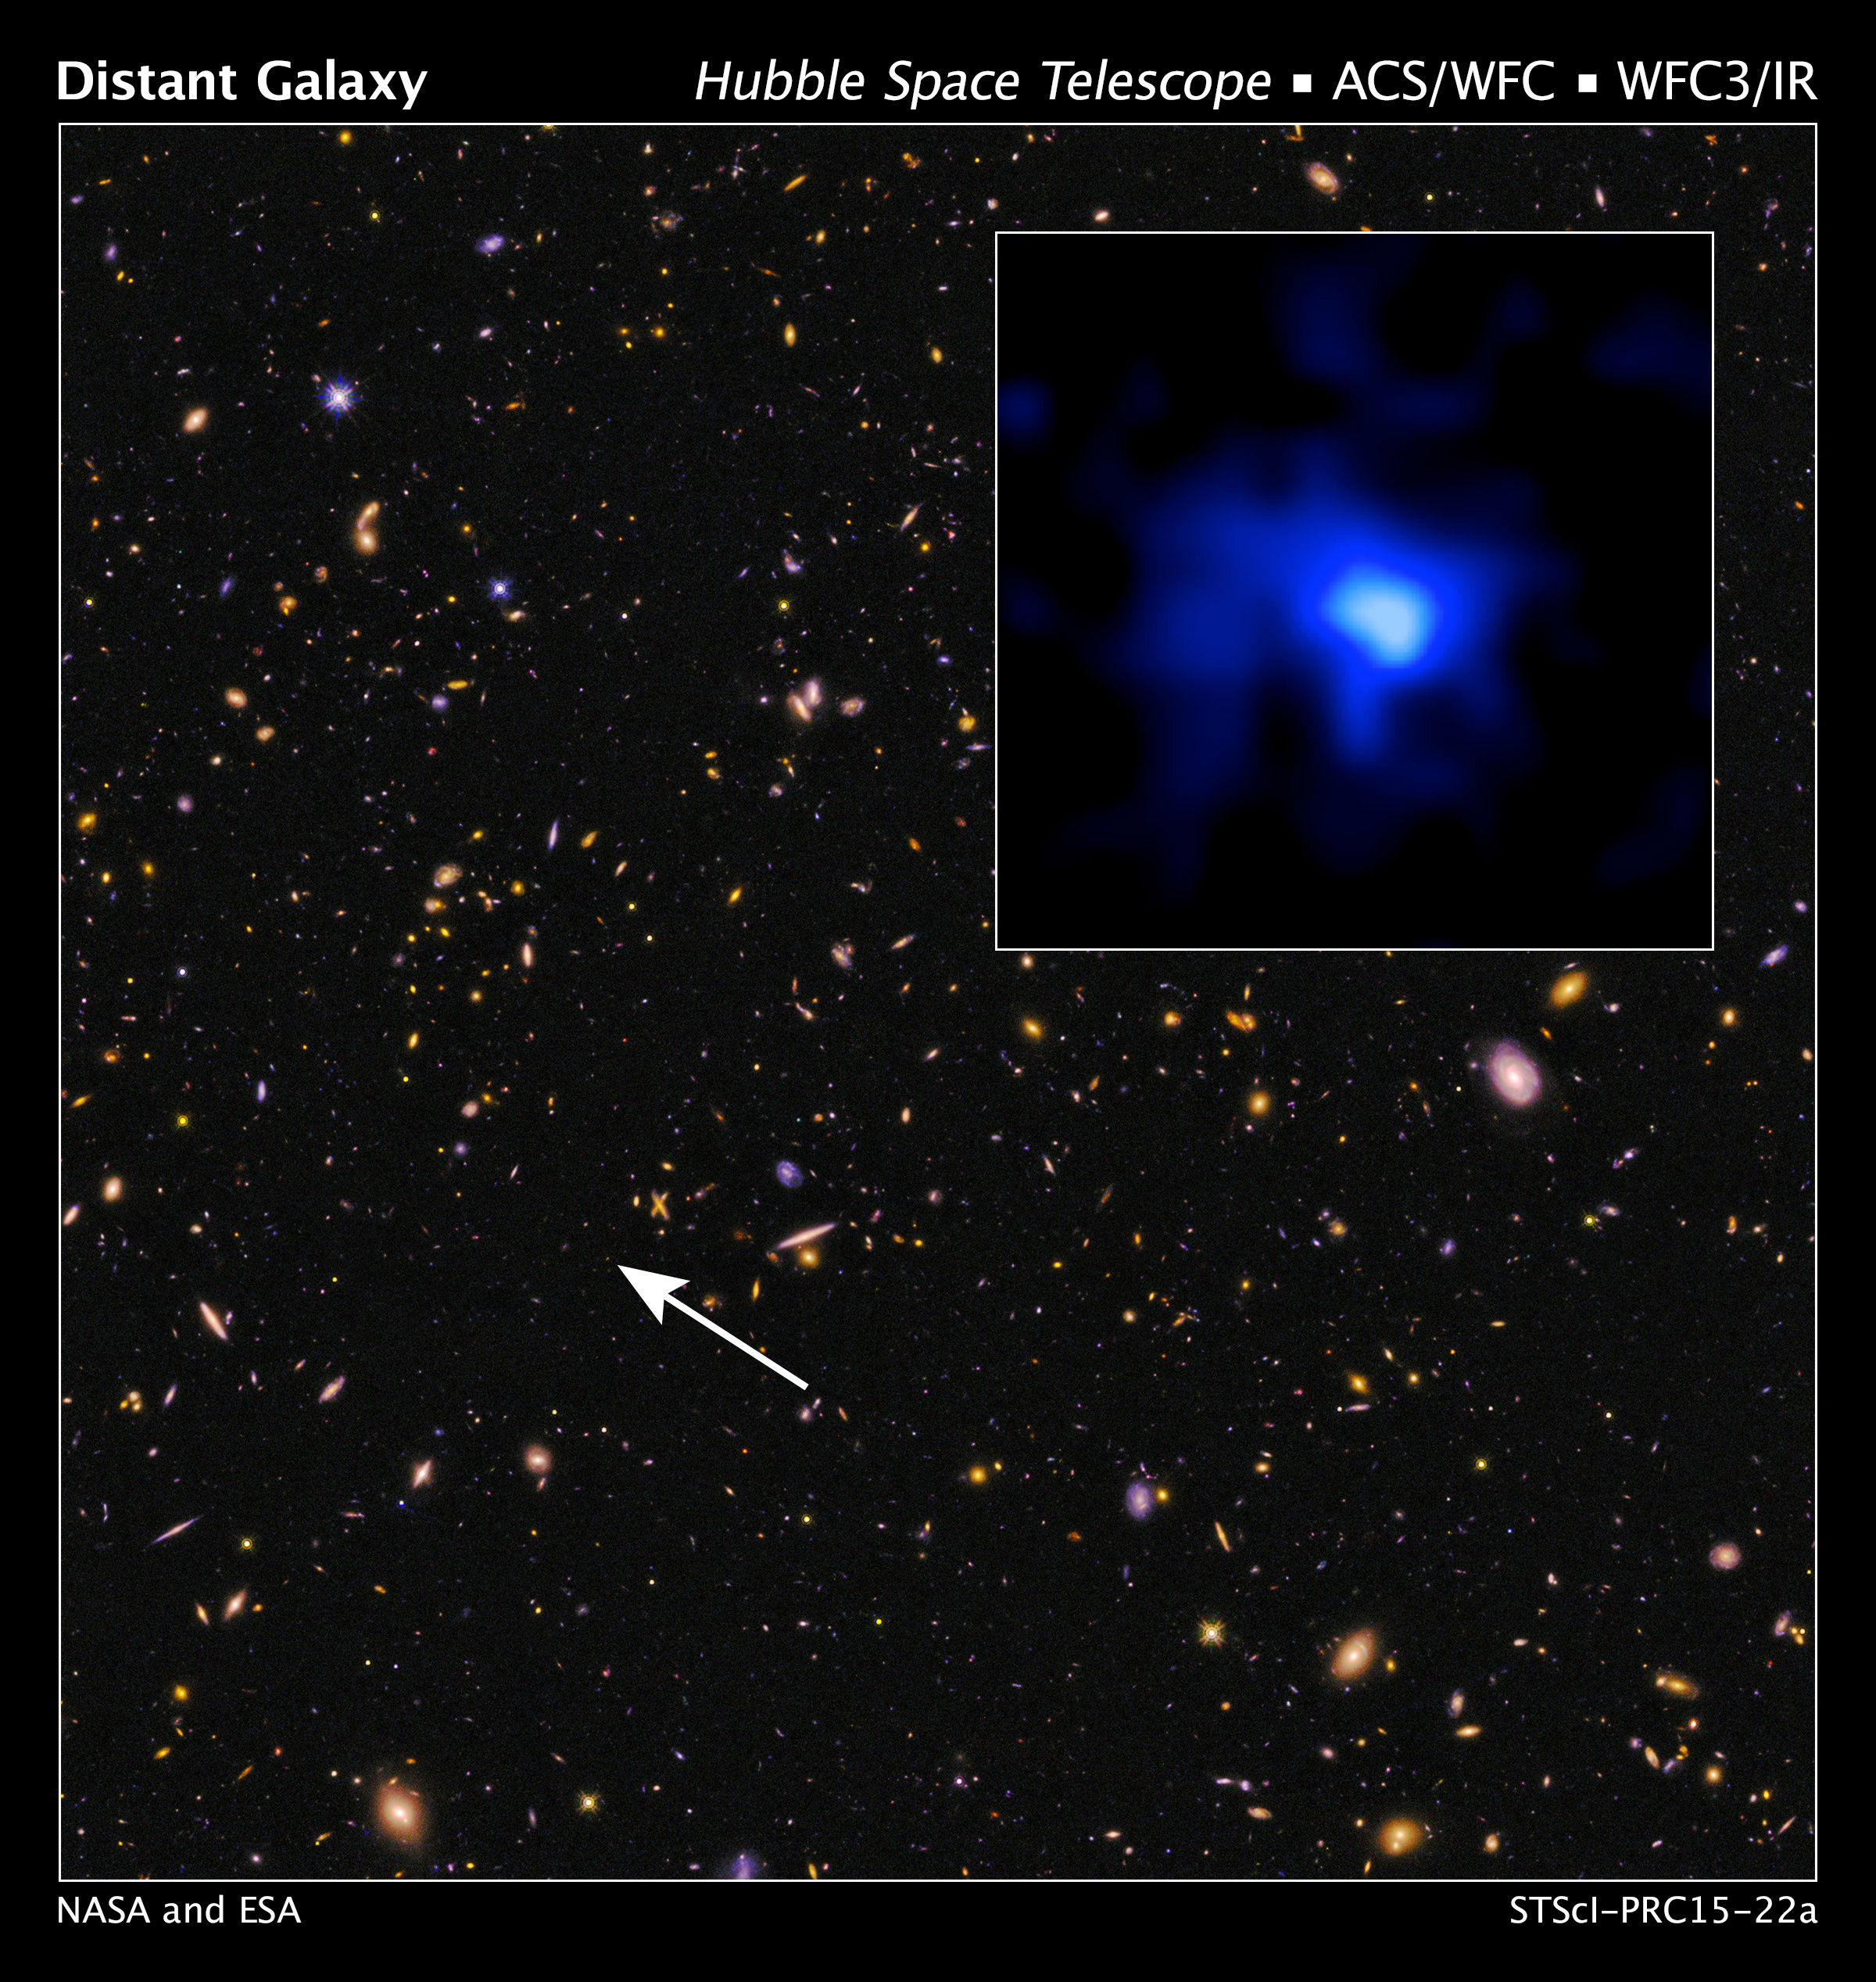

Astronomers set a new galaxy distance record

This is a Hubble Space Telescope image of the farthest spectroscopically confirmed galaxy observed to date (inset). It was identified as a very bright source in this Hubble image of a field of galaxies in the CANDELS survey (Cosmic Assembly Near-infrared Deep Extragalactic Legacy Survey). NASA's Spitzer Space Telescope also observed the unique galaxy. The W. M. Keck Observatory was used to obtain a spectroscopic redshift (z=7.7), extending the previous redshift record. Measurements of the stretching of light, or redshift, give the most reliable distances to other galaxies. This source is thus currently the most distant confirmed galaxy known, and it appears to also be one of the most massive sources at that time. The galaxy existed over 13 billion years ago. The near-infrared image of the galaxy (inset) has been colored blue as suggestive of its young stellar population. The CANDELS field is a combination of visible-light and near-infrared exposures.

Credit: NASA, ESA, P. Oesch and I. Momcheva (Yale University), and the 3D-HST and HUDF09/XDF Teams